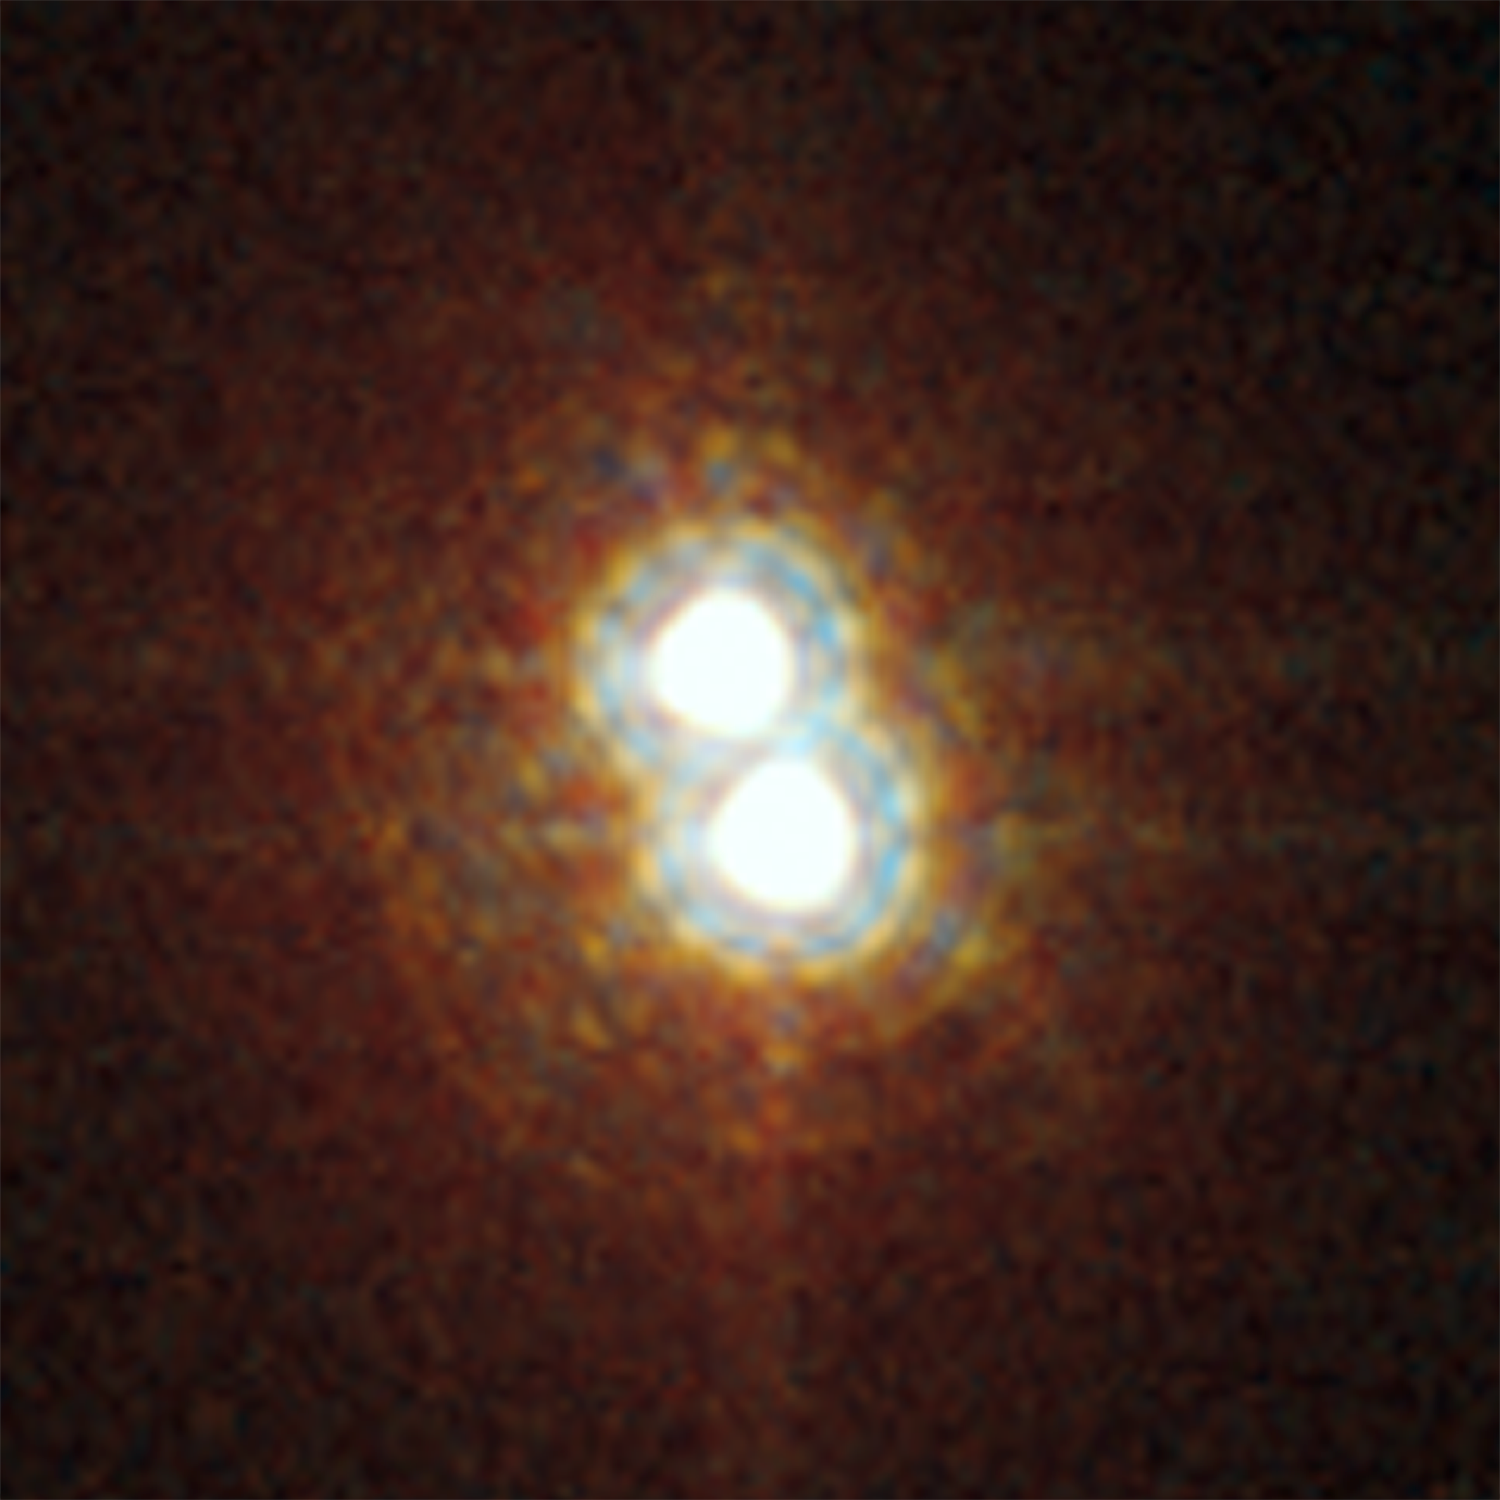

Star on a Hubble diet

ACS HRC image close-up showing the two stars of Pismis 24-1. It was thought to have an incredibly large mass of 200 to 300 solar masses. New NASA/ESA Hubble measurements of the star, have, however, resolved Pismis 24-1 into two separate stars, and, in doing so, have "halved" its mass to around 100 solar masses.

Credit: NASA, ESA and Jesœs Maíz Apellÿniz (Instituto de astrofísica de Andalucía, Spain). Acknowledgement: Davide De Martin (ESA/Hubble)